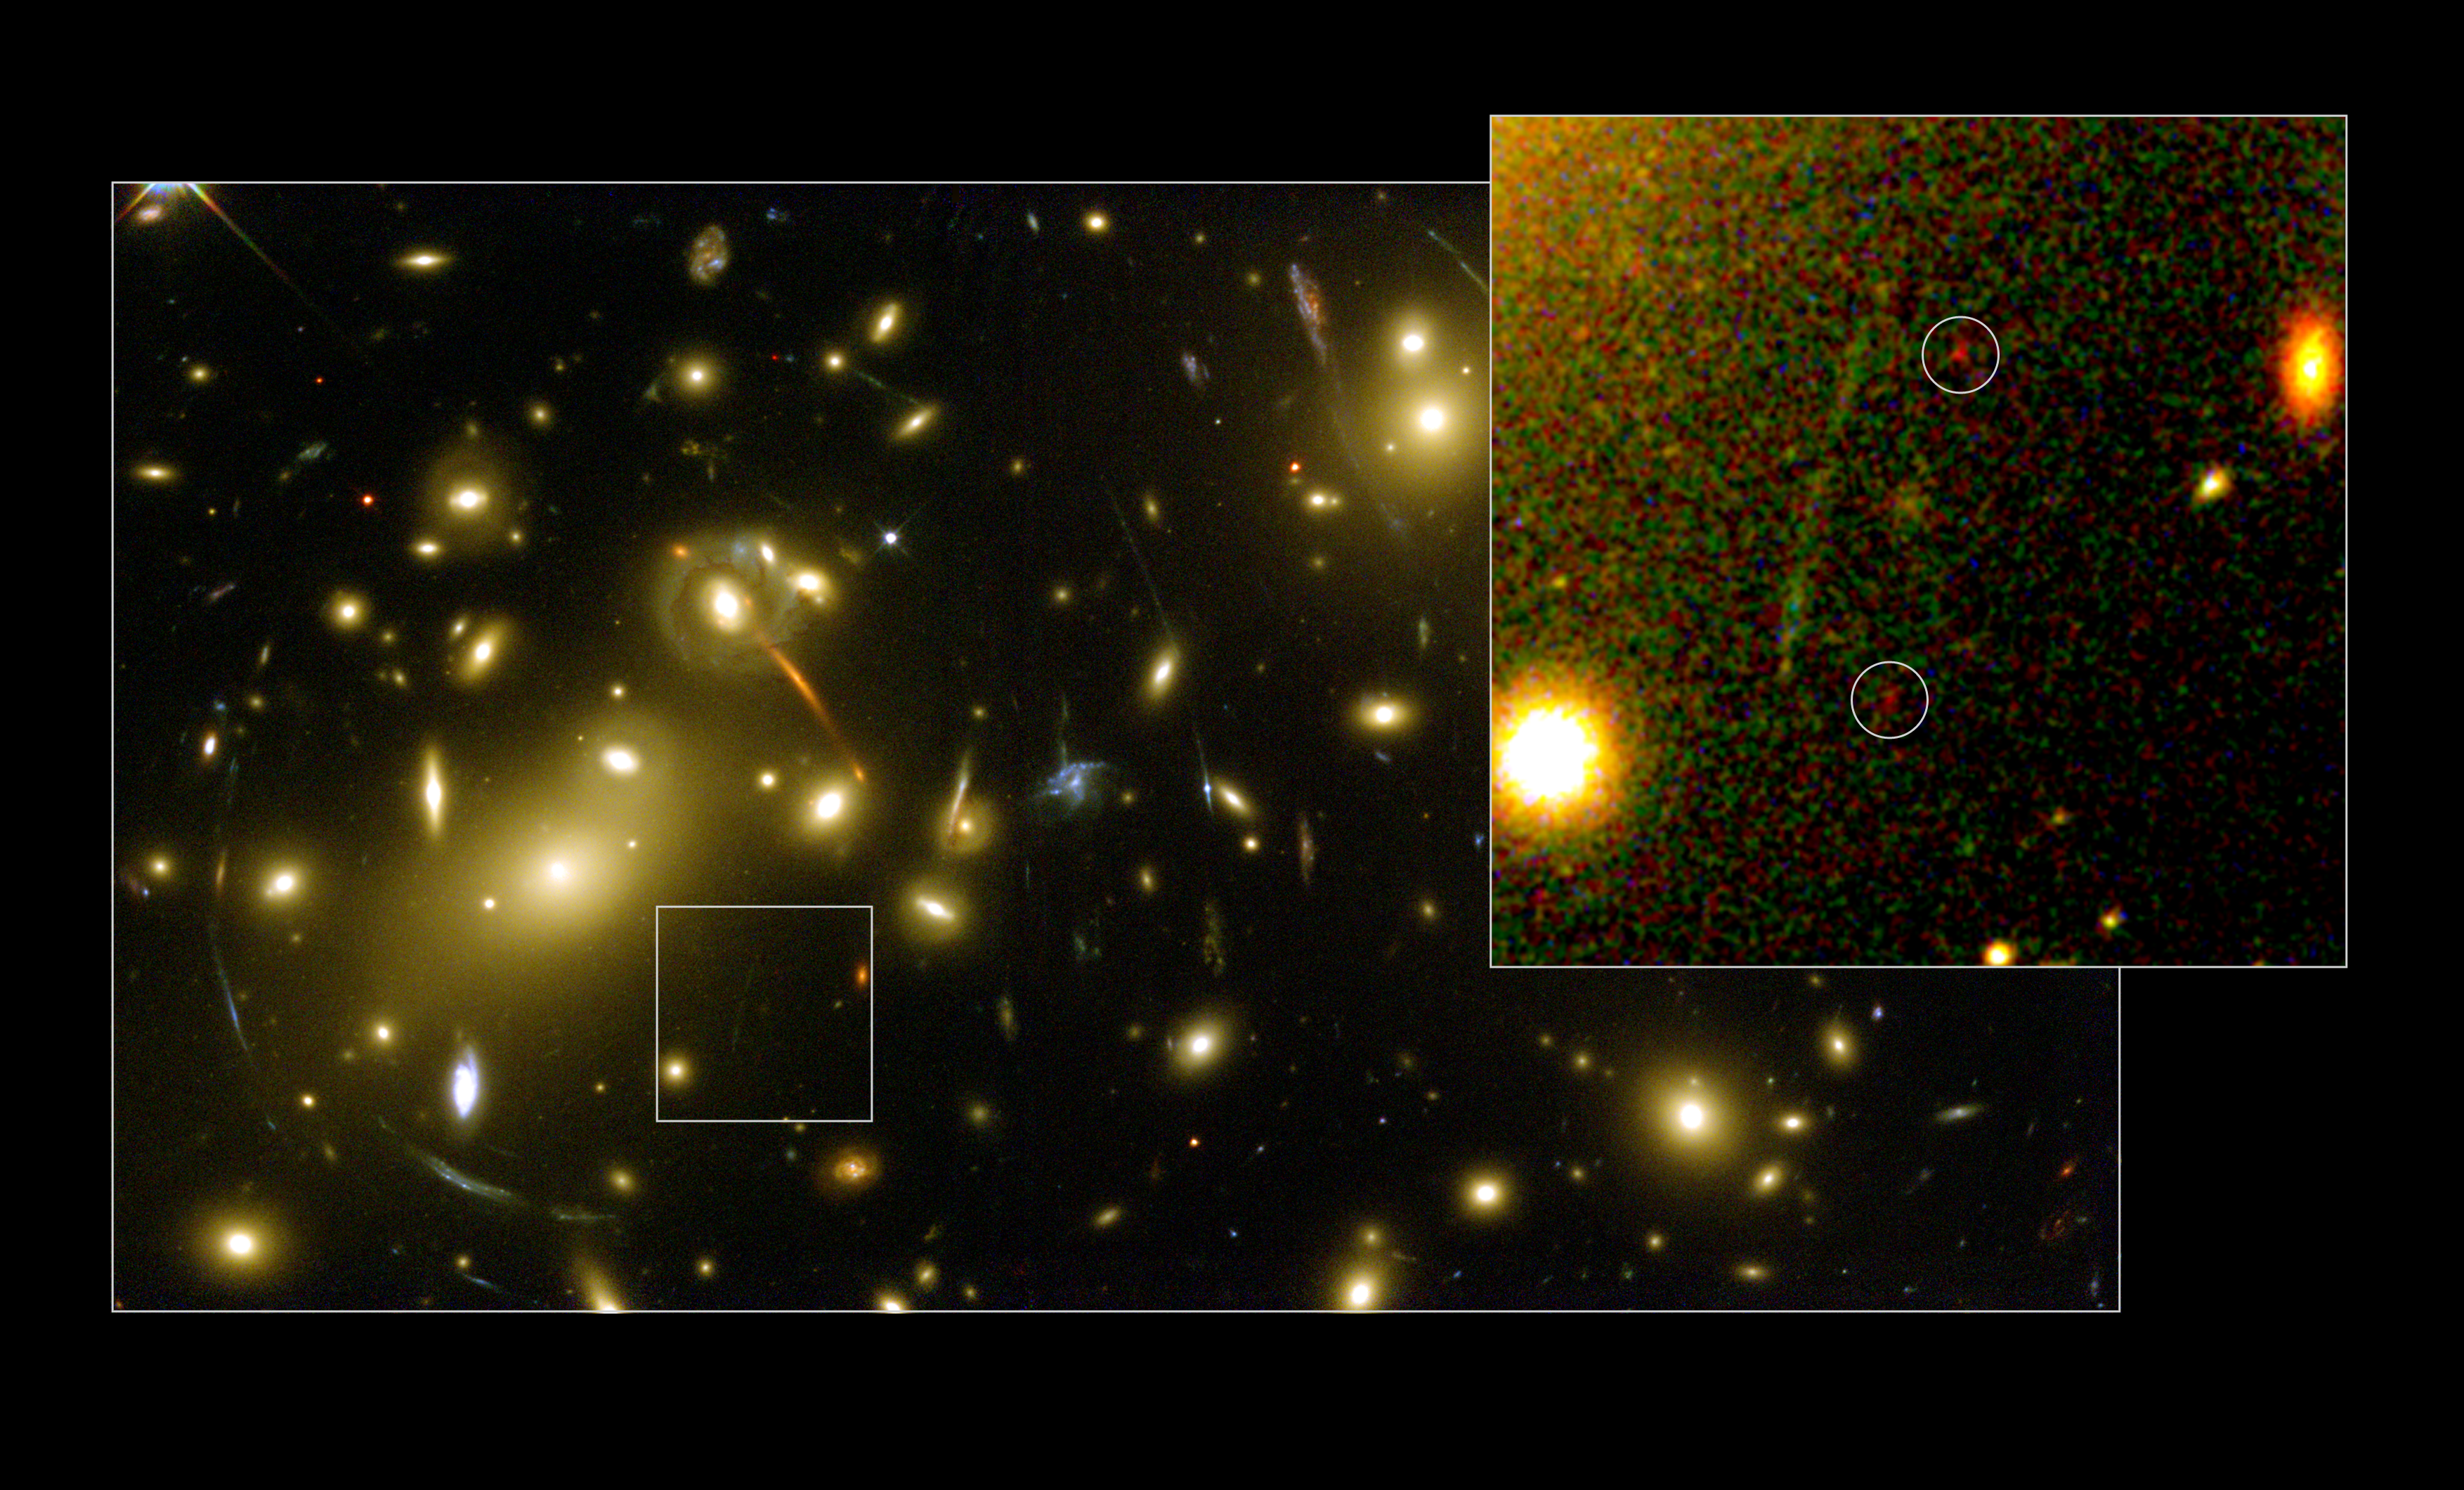

Hubble and Keck discover galaxy building block

This NASA/ESA Hubble Space Telescope image shows a newly discovered very small, faint galaxy 'building block' found via a unique collaboration between ground- and space-based telescopes. Hubble and the 10 metre Keck Telescopes in Hawaii joined forces using a galaxy cluster which acts as a gravitational lens to detect what scientists believe is one of the smallest and most distant objects ever found. The galaxy cluster Abell 2218 was used by a team of European and American astronomers led by Richard Ellis (Caltech, USA) in their systematic search for intrinsically faint distant star-forming systems. Without the help from this cluster's magnifying power (it magnifies by around 30 times) the galaxy building block would have been undetectable with present facilities. In the image to the right, the object is seen distorted into two nearly identical, very red 'images' by the gravitational lens. The image pair represents the magnified result of a single background object gravitationally lensed by Abell 2218 and viewed at a distance of 13.4 billion light-years. The intriguing object contains only one million stars, far fewer than a mature galaxy, and Ellis and co-workers believe it is very young. Such young star-forming systems of low mass at early cosmic times are likely to be the objects from which the mature galaxies around us today have formed. In the image to the left, the full overview of the galaxy cluster Abell 2218 is seen. This image was taken by Hubble in 1999 during the Early Release Observations made immediately after the Hubble Servicing Mission 3A.

Credit: ESA, NASA, Richard Ellis (Caltech, USA) and Jean-Paul Kneib (Observatoire Midi-Pyrénées, France)